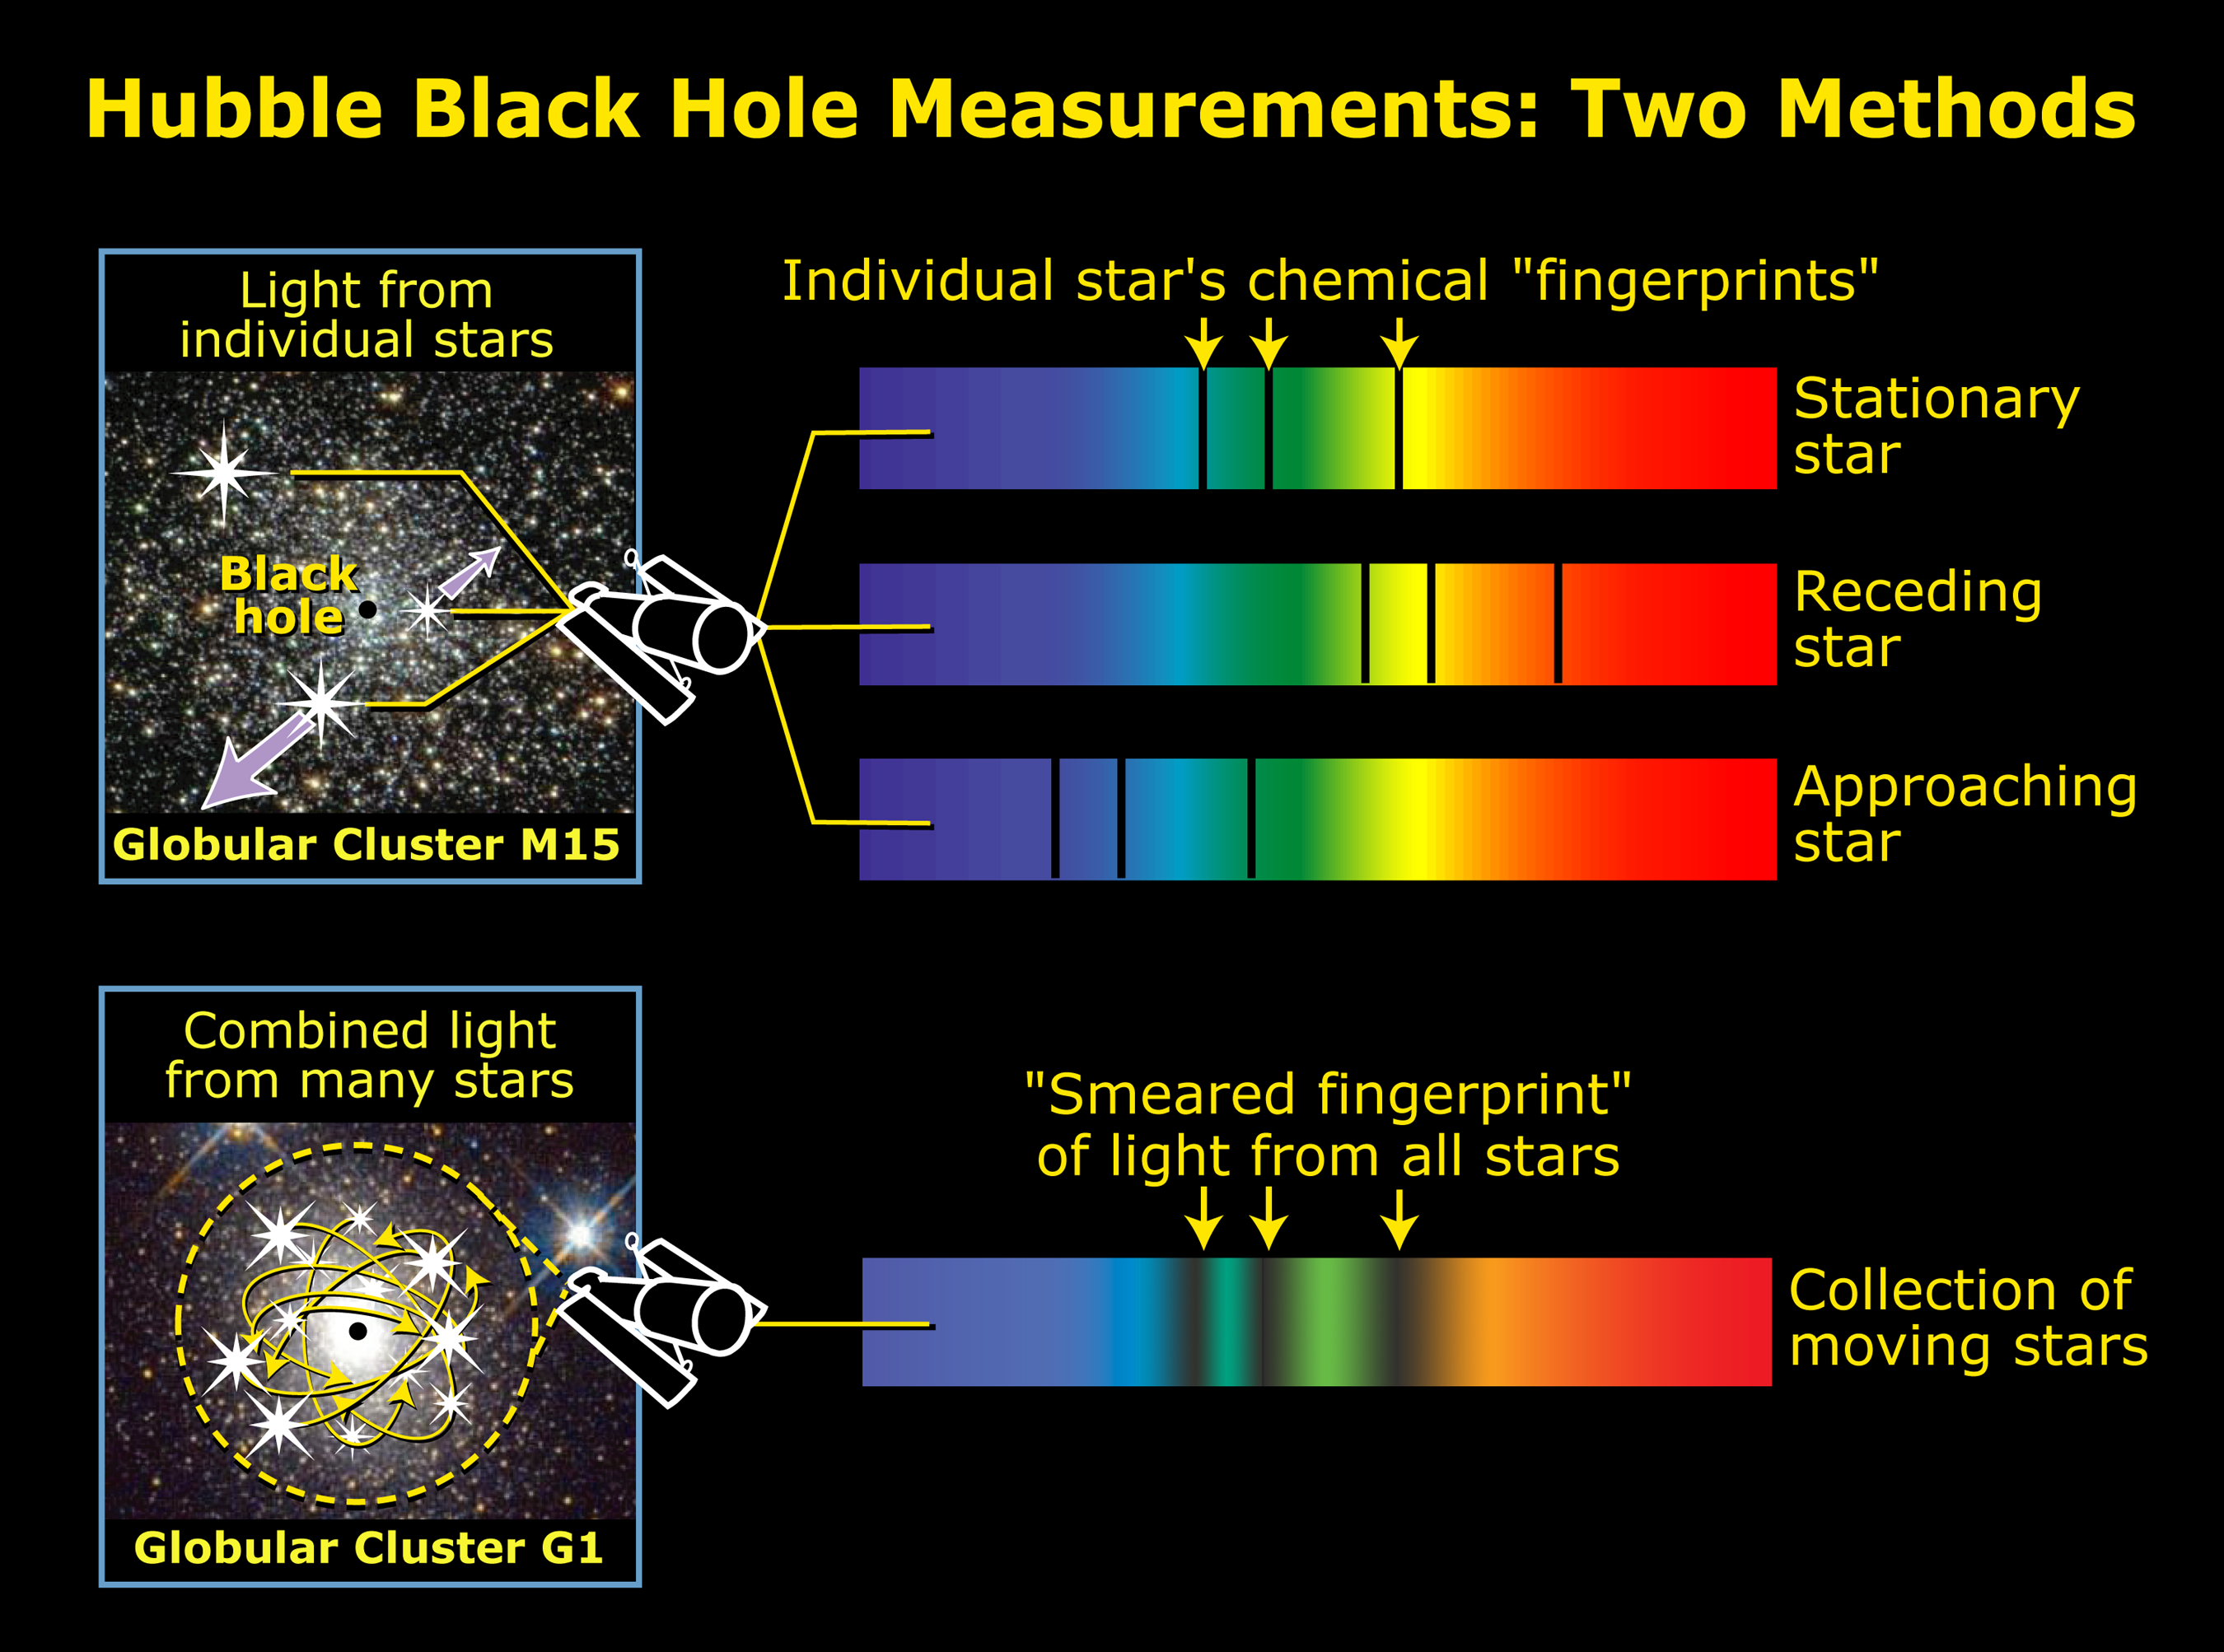

Using spectroscopy to measure velocity dispersion

Medium-size black holes actually do exist, according to the latest findings from NASA/ESA Hubble Space Telescope, but scientists had to look in some unexpected places to find them. The previously undiscovered black holes provide an important link that sheds light on the way in which black holes grow. Even more odd, these new black holes were found in the cores of glittering, 'beehive' swarms of stars called globular star clusters, which orbit our Milky Way and other galaxies. The black hole in globular cluster M15 is 4, 000 times more massive than our Sun. G1, a much larger globular cluster, harbors a heftier black hole, about 20, 000 times more massive than our Sun.

Credit: NASA/ESA, A. Feild, and R. Van Der Marel (STScI)